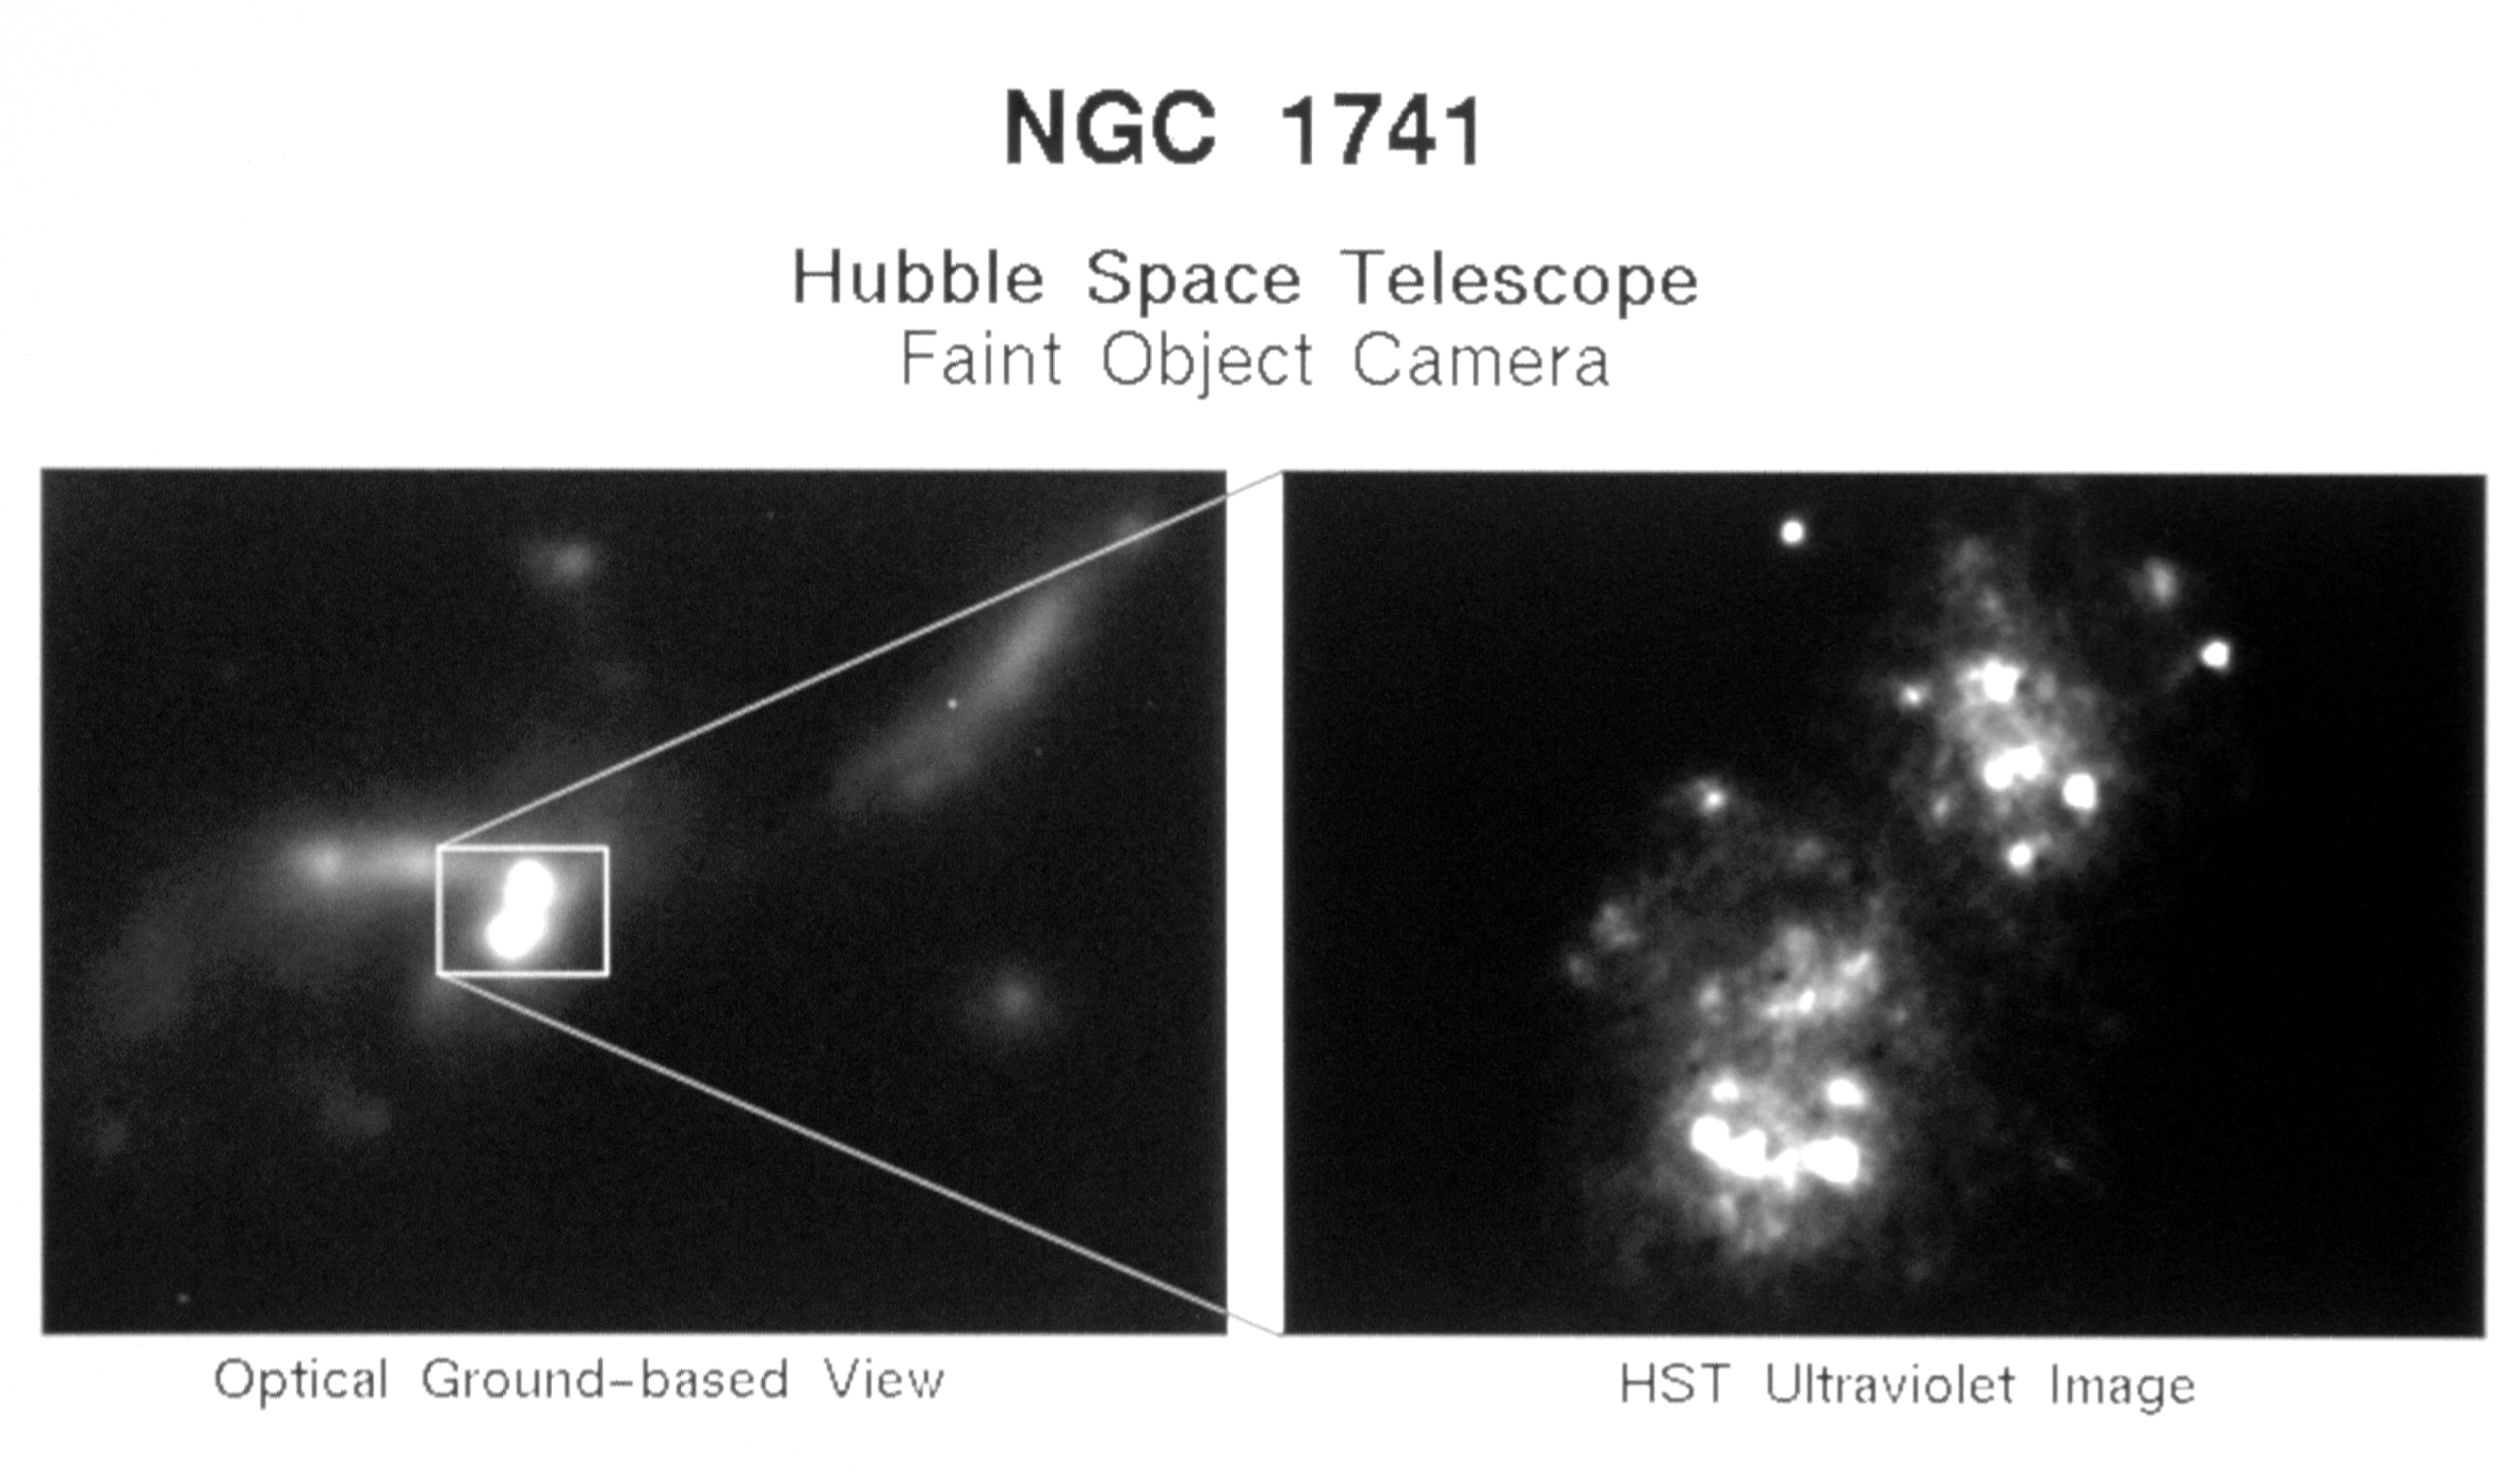

Hubble reveals young starburst activity in colliding galaxies

[Right] A NASA/ESA Hubble Telescope (HST) image of NGC 1741, a pair of colliding galaxies are undergoing a burst star formation as a result of a collision.

The results from this observations are being presented to the American Astronomical Society meeting in Berkeley, California.

Credit: Dr. Peter Conti (University or Colorado) /NASA & ESA